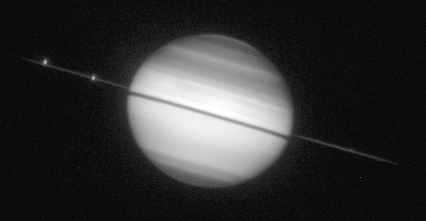

Saturn ring-plane crossing

This picture was taken shortly before the ring plane crossing. The rings do not disappear completely because the edge of the rings reflects sunlight. The dark band across the middle of Saturn is the shadow of the rings cast on the planet (the Sun is almost 3 degrees above the ring plane).

Credit: Amanda S. Bosh (Lowell Observatory), Andrew S. Rivkin (Univ. of Arizona/LPL), the HST High Speed Photometer Instrument Team (R.C. Bless, PI), and NASA/ESA